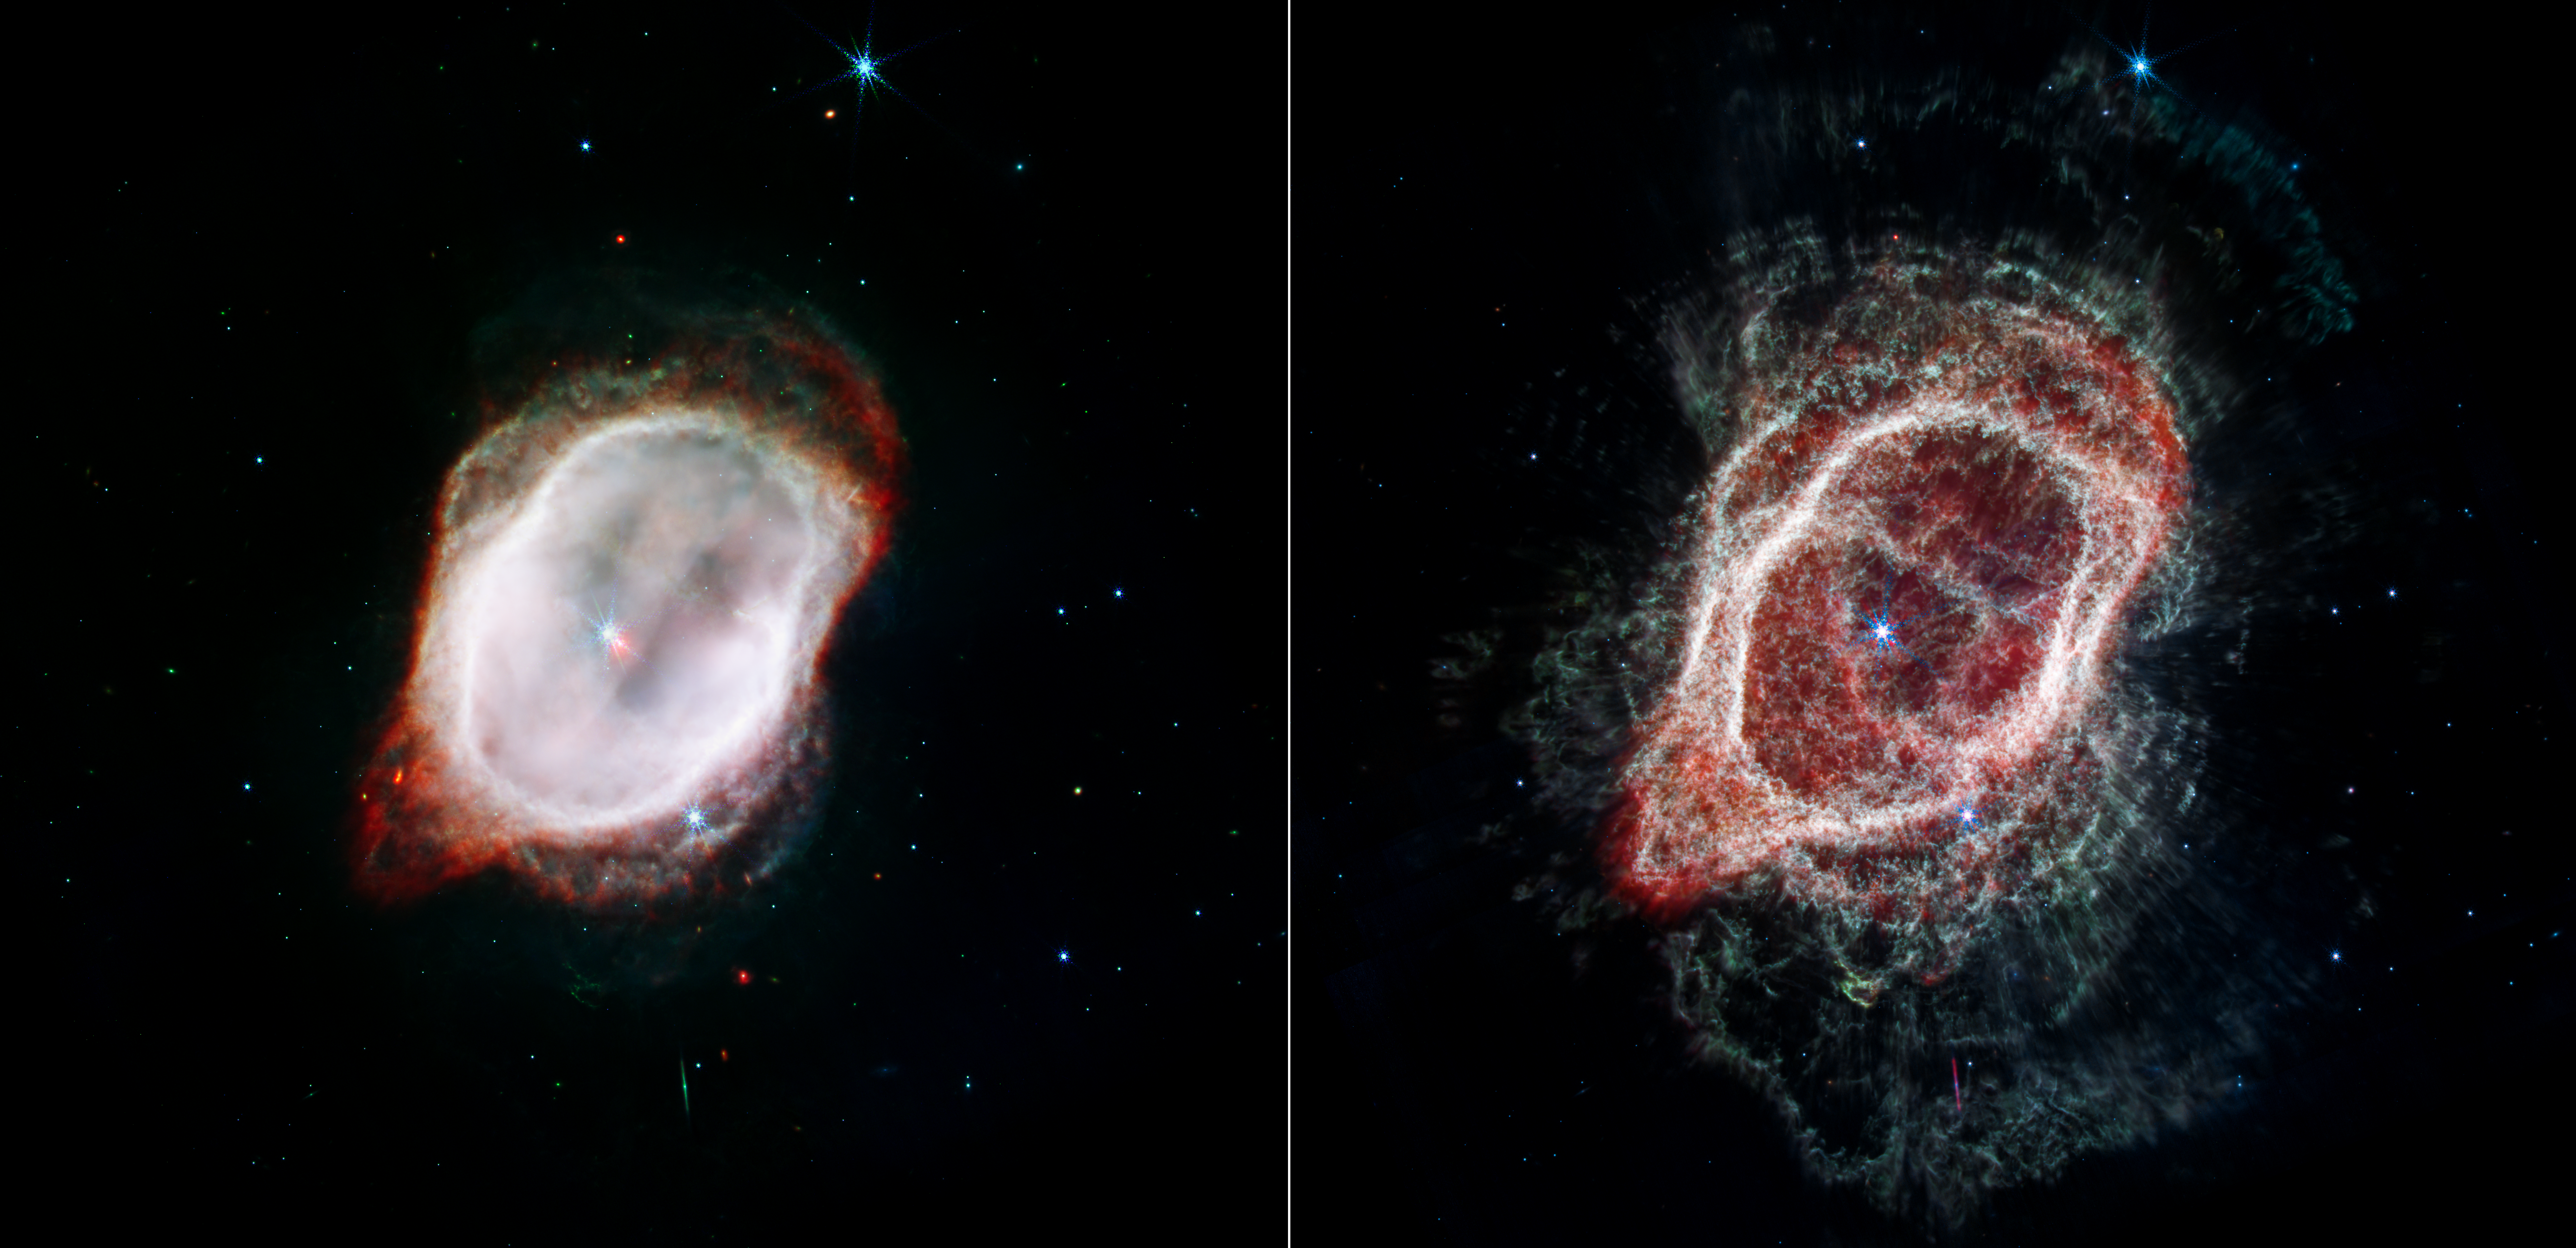

Two Views of the Gas in the Southern Ring Nebula (NIRCam and MIRI Composite Images)

The NASA/ESA/CSA James Webb Space Telescope offers dramatically different views of the same scene! Each image combines near- and mid-infrared light from three filters from the Near-Infrared Camera (NIRCam) and Mid-Infrared Instrument (MIRI).

At left, Webb’s image of the Southern Ring Nebula (NGC 3132) highlights the very hot gas that surrounds the central stars. This hot gas is banded by a sharp ring of cooler gas, which appears in both images.

At right, Webb’s image traces the star’s scattered outflows that have reached farther into the cosmos. Most of the molecular gas that lies outside the band of cooler gas is also cold. It is also far clumpier, consisting of dense knots of molecular gas that form a halo around the central stars.
By accounting for the temperatures and gas contents in both areas, inside and outside the band, and by combining Webb’s data with precise measurements from other observatories, scientists were able to create far more accurate models to demonstrate when gas was ejected by the central star (which appears red in the image at left).

What about the third star that is visible at the lower-right edge of the band within the nebula? From Webb’s vantage point, it appears within the scene, but isn’t part of the nebula itself. It’s merely “photobombing” this party.

Credit: NASA, ESA, CSA, STScI, O. De Marco (Macquarie University), J. DePasquale (STScI)